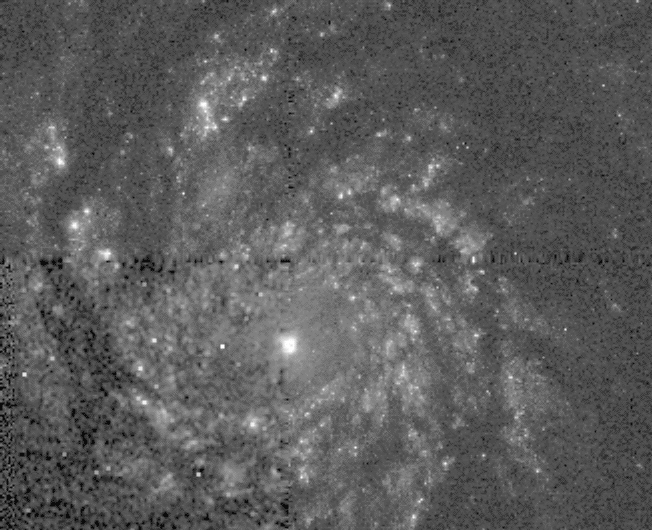

The whirlpool galaxy

NASA/ESA Hubble Space Telescope has returned the most detailed images ever of supernova 1994I which is in the 'Whirlpool Galaxy' (M51) located 20 million light-years away in the constellation Canes Venatici.

Credit: Robert P. Kirshner/Harvard-Smithsonian Center forAstrophysics, NASA/ESA